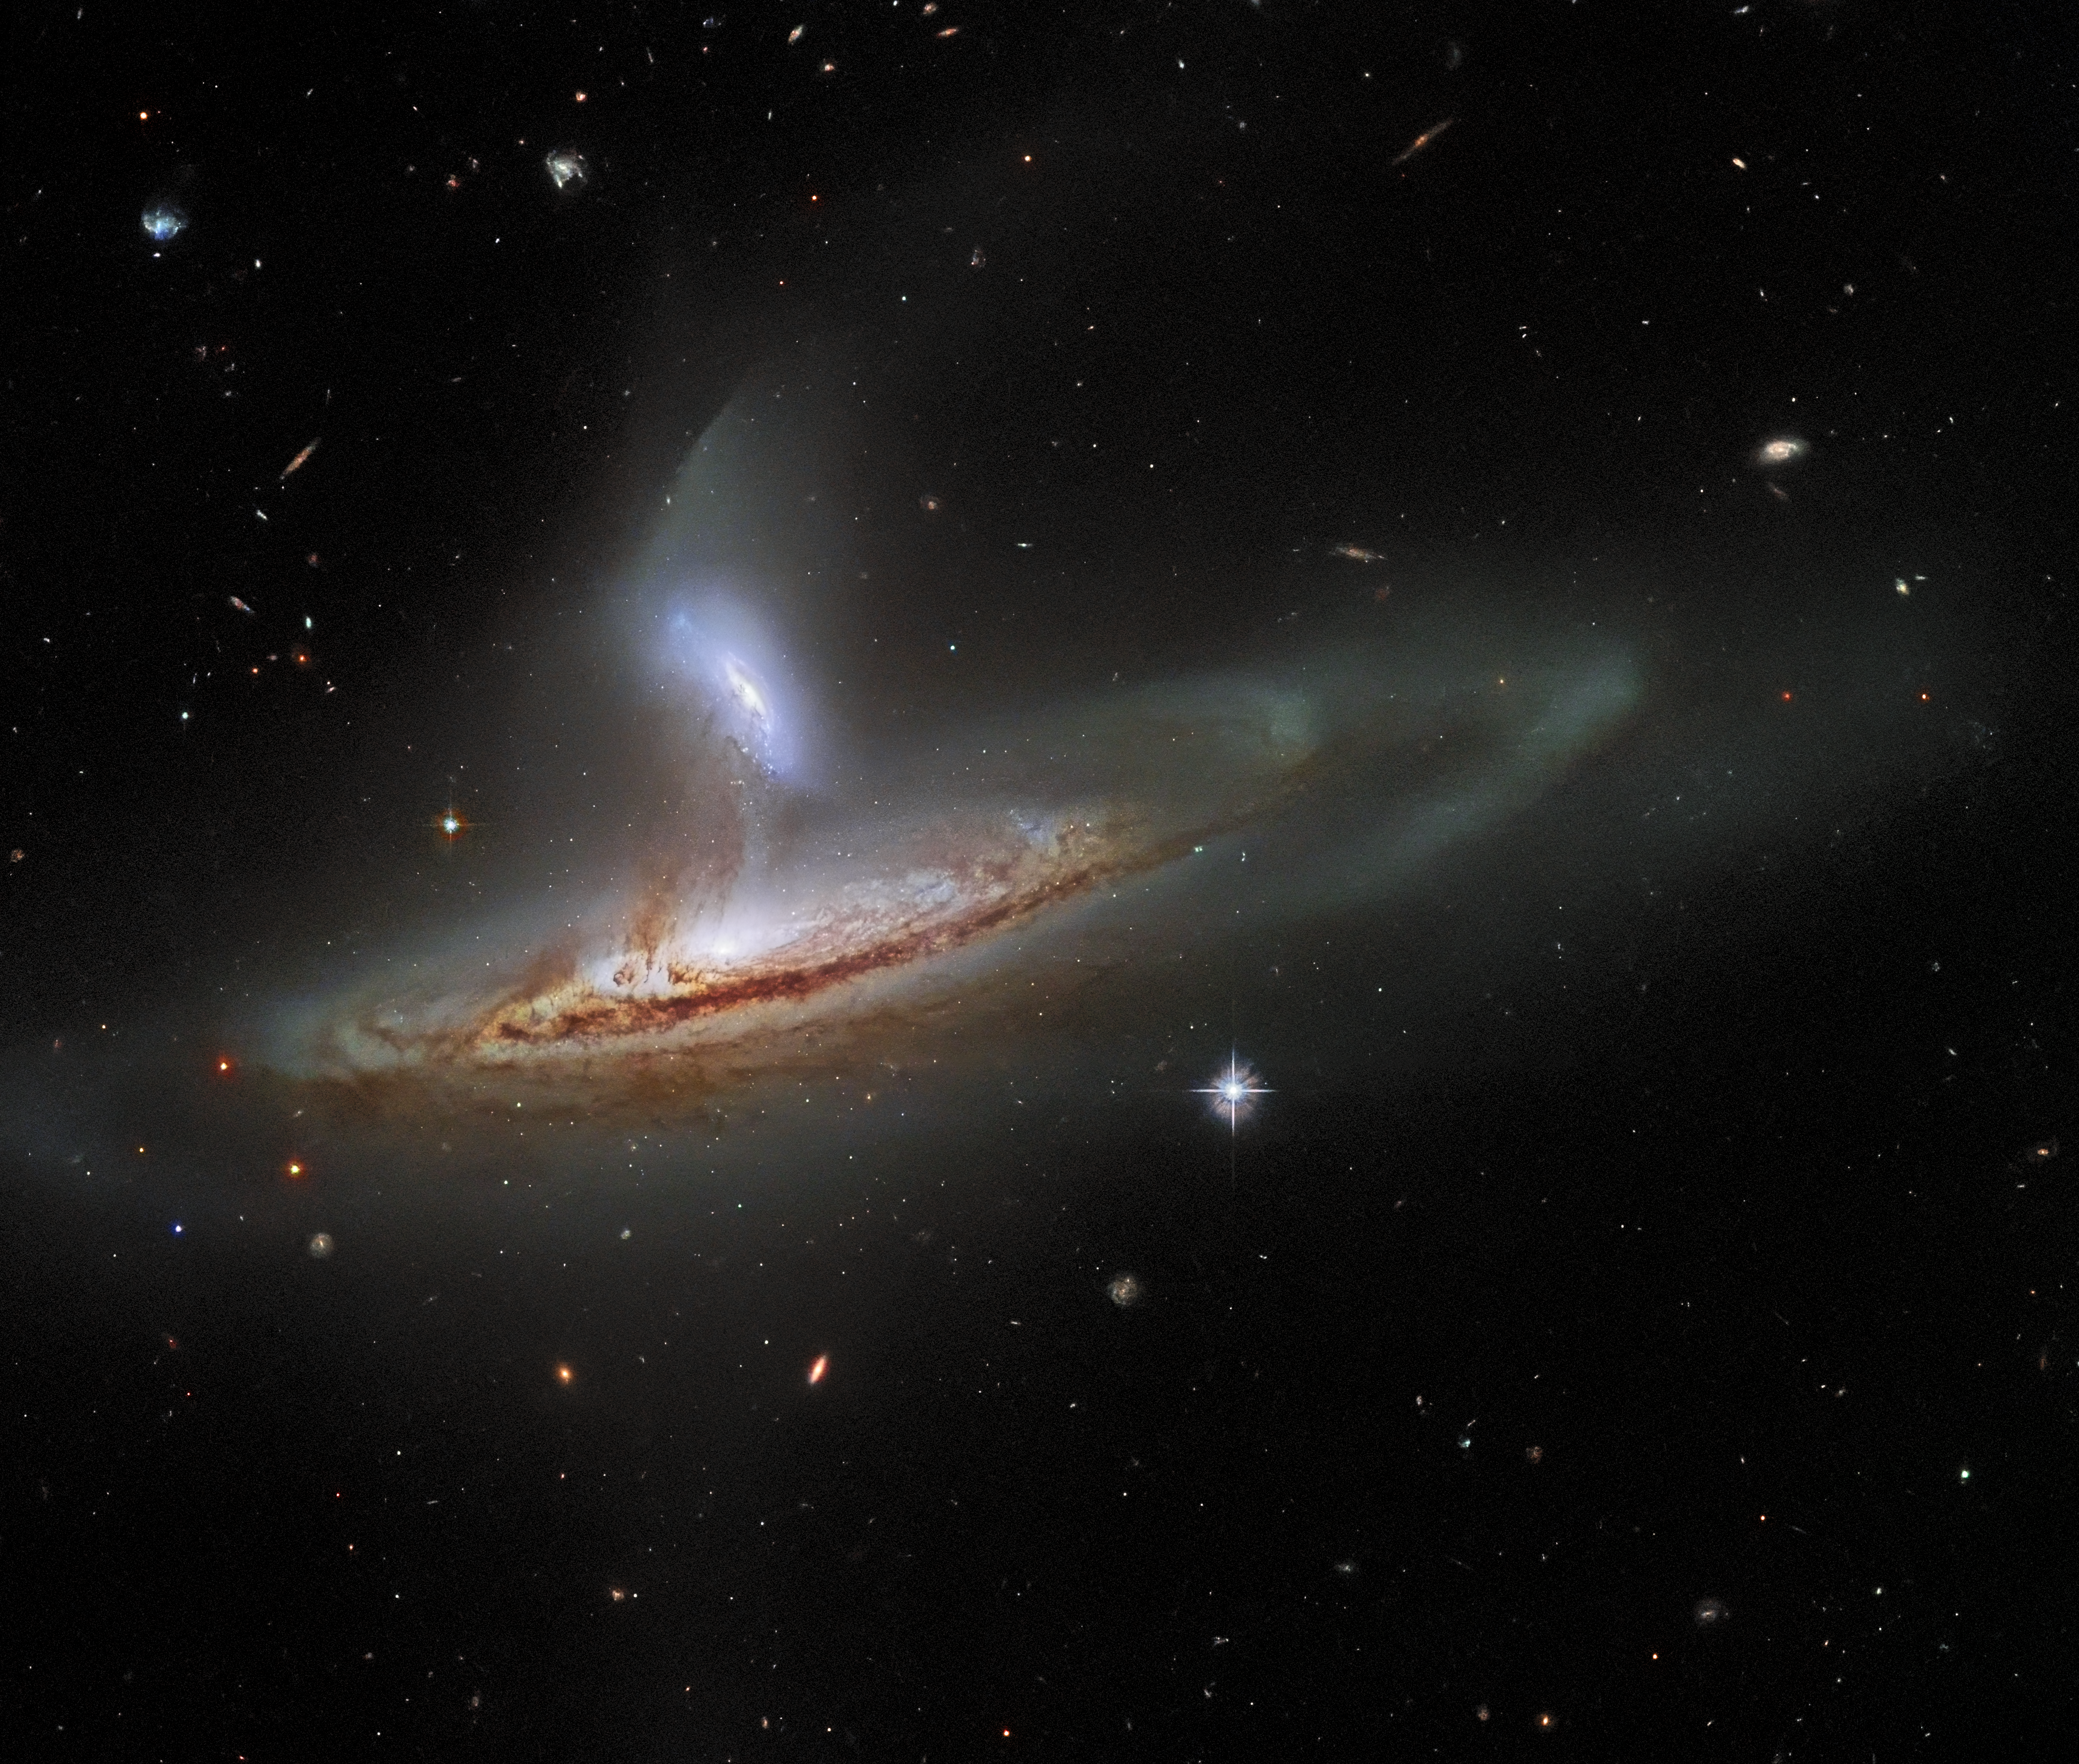

A Cosmic Draw

It is now widely accepted amongst astronomers that an important aspect of how galaxies evolve is the way they interact with one another. Galaxies can merge, collide, or brush past one another — each of which has a significant impact on their shapes and structures. As common as these interactions are thought to be in the Universe, it is rare to capture an image of two galaxies interacting in such a visibly dynamic way. This image, from the NASA/ESA Hubble Space Telescope, feels incredibly three-dimensional for a piece of deep-space imagery.

The subject of this image is named Arp 282, an interacting galaxy pair that is composed of the Seyfert galaxy NGC 169 (bottom) and the galaxy IC 1559 (top). If you’re interested in learning more about Seyfert galaxies, you can read about the Seyfert galaxy NGC 5728 here. Interestingly, both of the galaxies comprising Arp 282 have monumentally energetic cores, known as active galactic nuclei (AGN), although it is difficult to tell that from this image. This is actually rather fortunate, because if the full emission of two AGNs was visible in this image, then it would probably obscure the beautifully detailed tidal interactions occurring between NGC 169 and IC 1559. Tidal forces occur when an object’s gravity causes another object to distort or stretch. The direction of the tidal forces will be away from the lower-mass object and towards the higher mass object. When two galaxies interact, gas, dust and even entire solar systems will be drawn away from one galaxy towards the other by these tidal forces. This process can actually be seen in action in this image — delicate streams of matter have formed, visibly linking the two galaxies.

Credit: ESA/Hubble & NASA, J. Dalcanton, Dark Energy Survey, DOE, FNAL/DECam, CTIO/NOIRLab/NSF/AURA, SDSS Acknowledgement: J. Schmidt